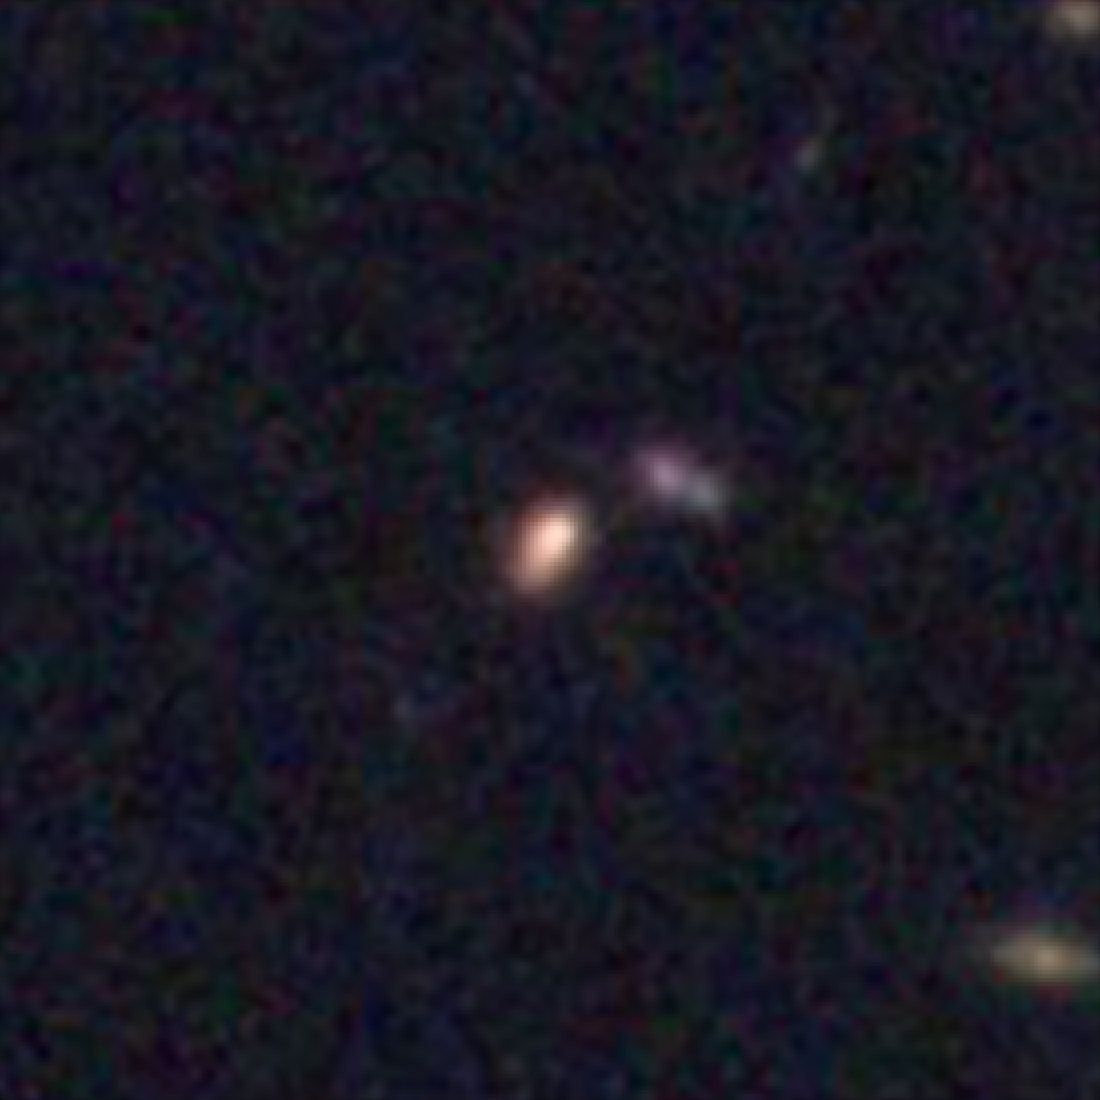

Hubble galaxy at redshift z = 2.8

This image, taken by the NASA/ESA Hubble Space Telescope, shows a galaxy similar in mass to the Milky Way. The galaxy is seen as it was 11.3 billion years ago.

Credit: NASA, ESA, C. Papovich (Texas A&M University), H. Ferguson (STScI), S. Faber (University of California, Santa Cruz), and I. Labbé (Leiden University)